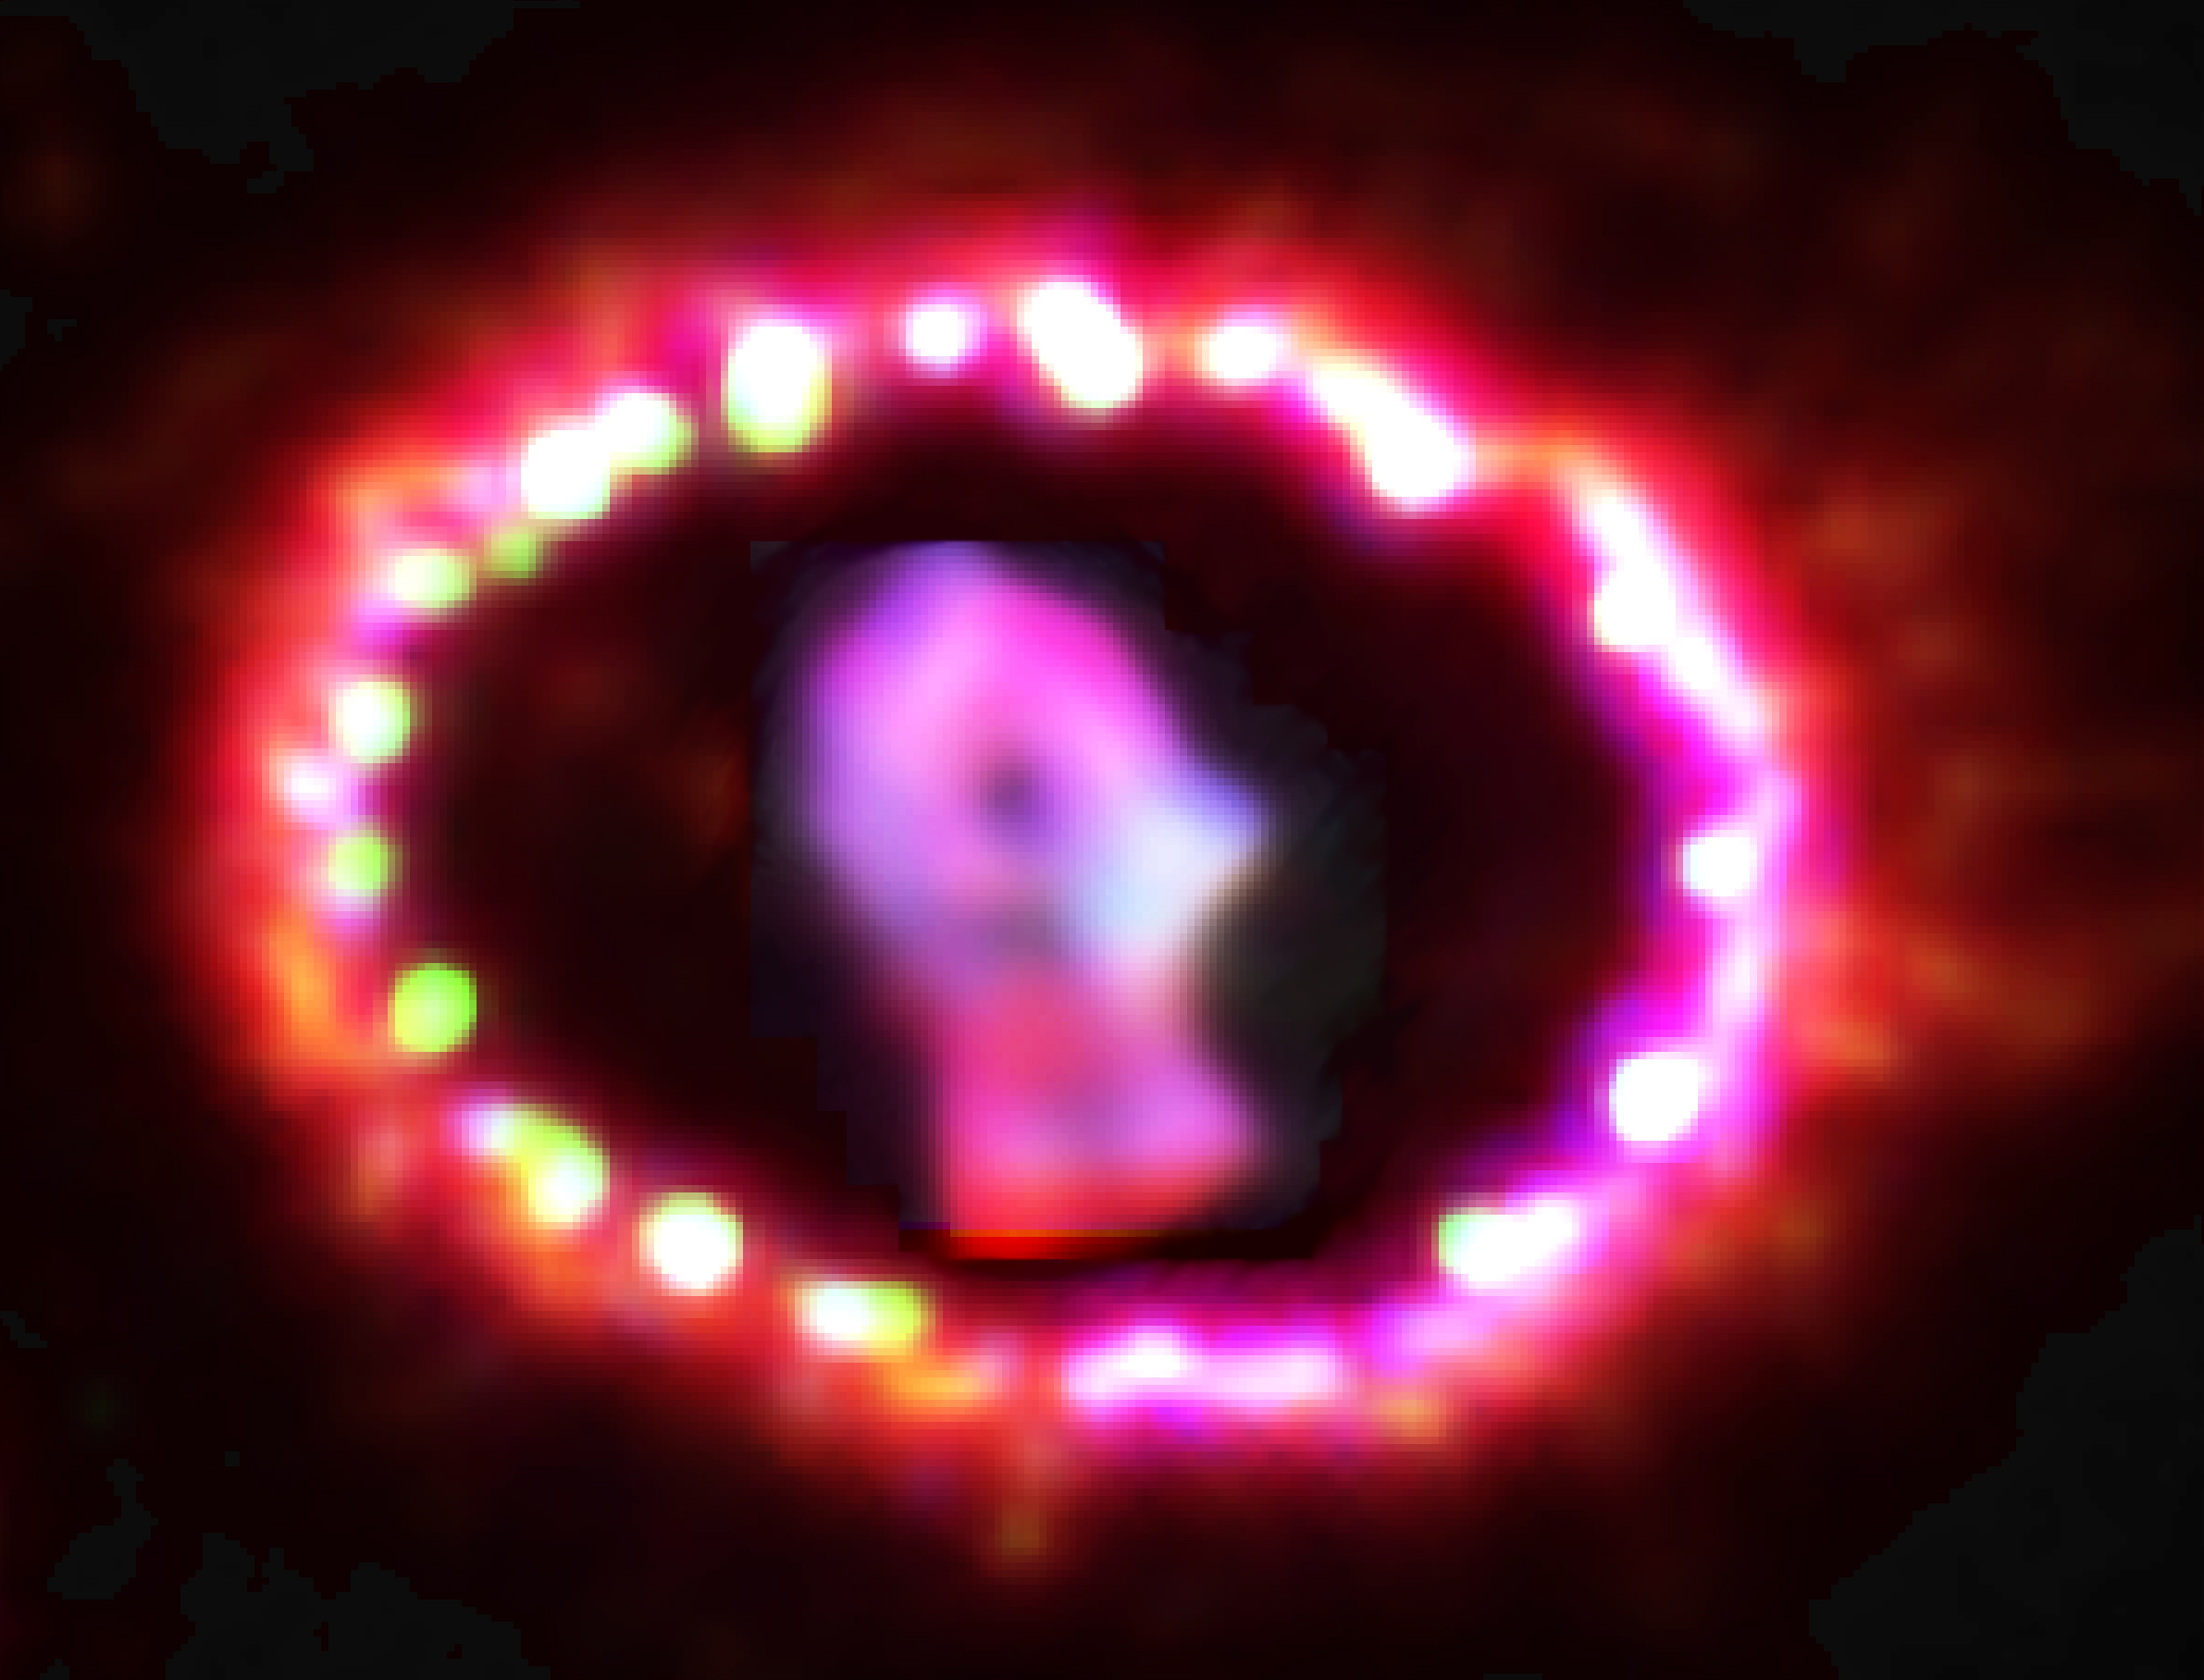

Image of Supernova 1987A

This Hubble image of Supernova 1987A shows the brightening ring of supernova debris. The closest supernova seen in almost 400 years, Supernova 1987A is located in the Large Magellanic Cloud.

Credit: NASA, ESA and Pete Challis (Harvard-Smithsonian Center for Astrophysics)